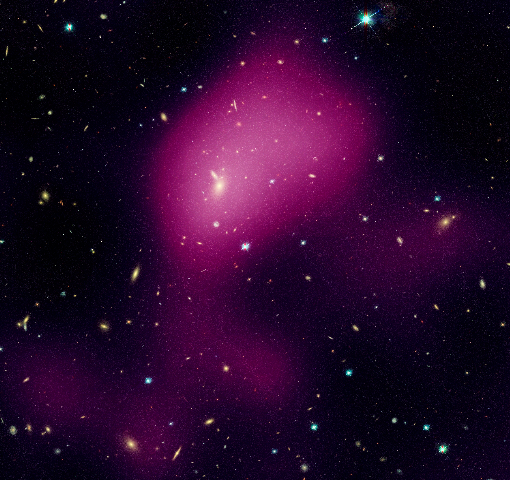

Hubble maps dark matter web in a large galaxy cluster (individual image 3)

A Hubble study pinpointed four main areas in the supercluster where dark matter has pooled into dense clumps. These areas match the location of hundreds of galaxies that have experienced a violent history in their passage from the outskirts of the supercluster into these dense regions. To make this image, astronomers superimposed the dark matter map over a Hubble visible-light image of the supercluster galaxies.

The image is part of the Space Telescope Abell 901/902 Galaxy Evolution Survey (STAGES), which covers one of the largest patches of sky ever observed by the Hubble telescope. The area surveyed is so wide that it took 80 Hubble images to cover the entire field./p>

Hubble's Advanced Camera for Surveys made the observations in June and July 2005 and in January 2006.

Credit for the Hubble images: NASA, ESA, C. Heymans (University of British Columbia, Vancouver), M. Gray (University of Nottingham, U.K.), M. Barden (Innsbruck), and the STAGES collaboration
Credit for the ground-based image: ESO, C. Wolf (Oxford University, U.K.), K. Meisenheimer (Max-Planck Institute for Astronomy, Heidelberg), and the COMBO-17 collaboration